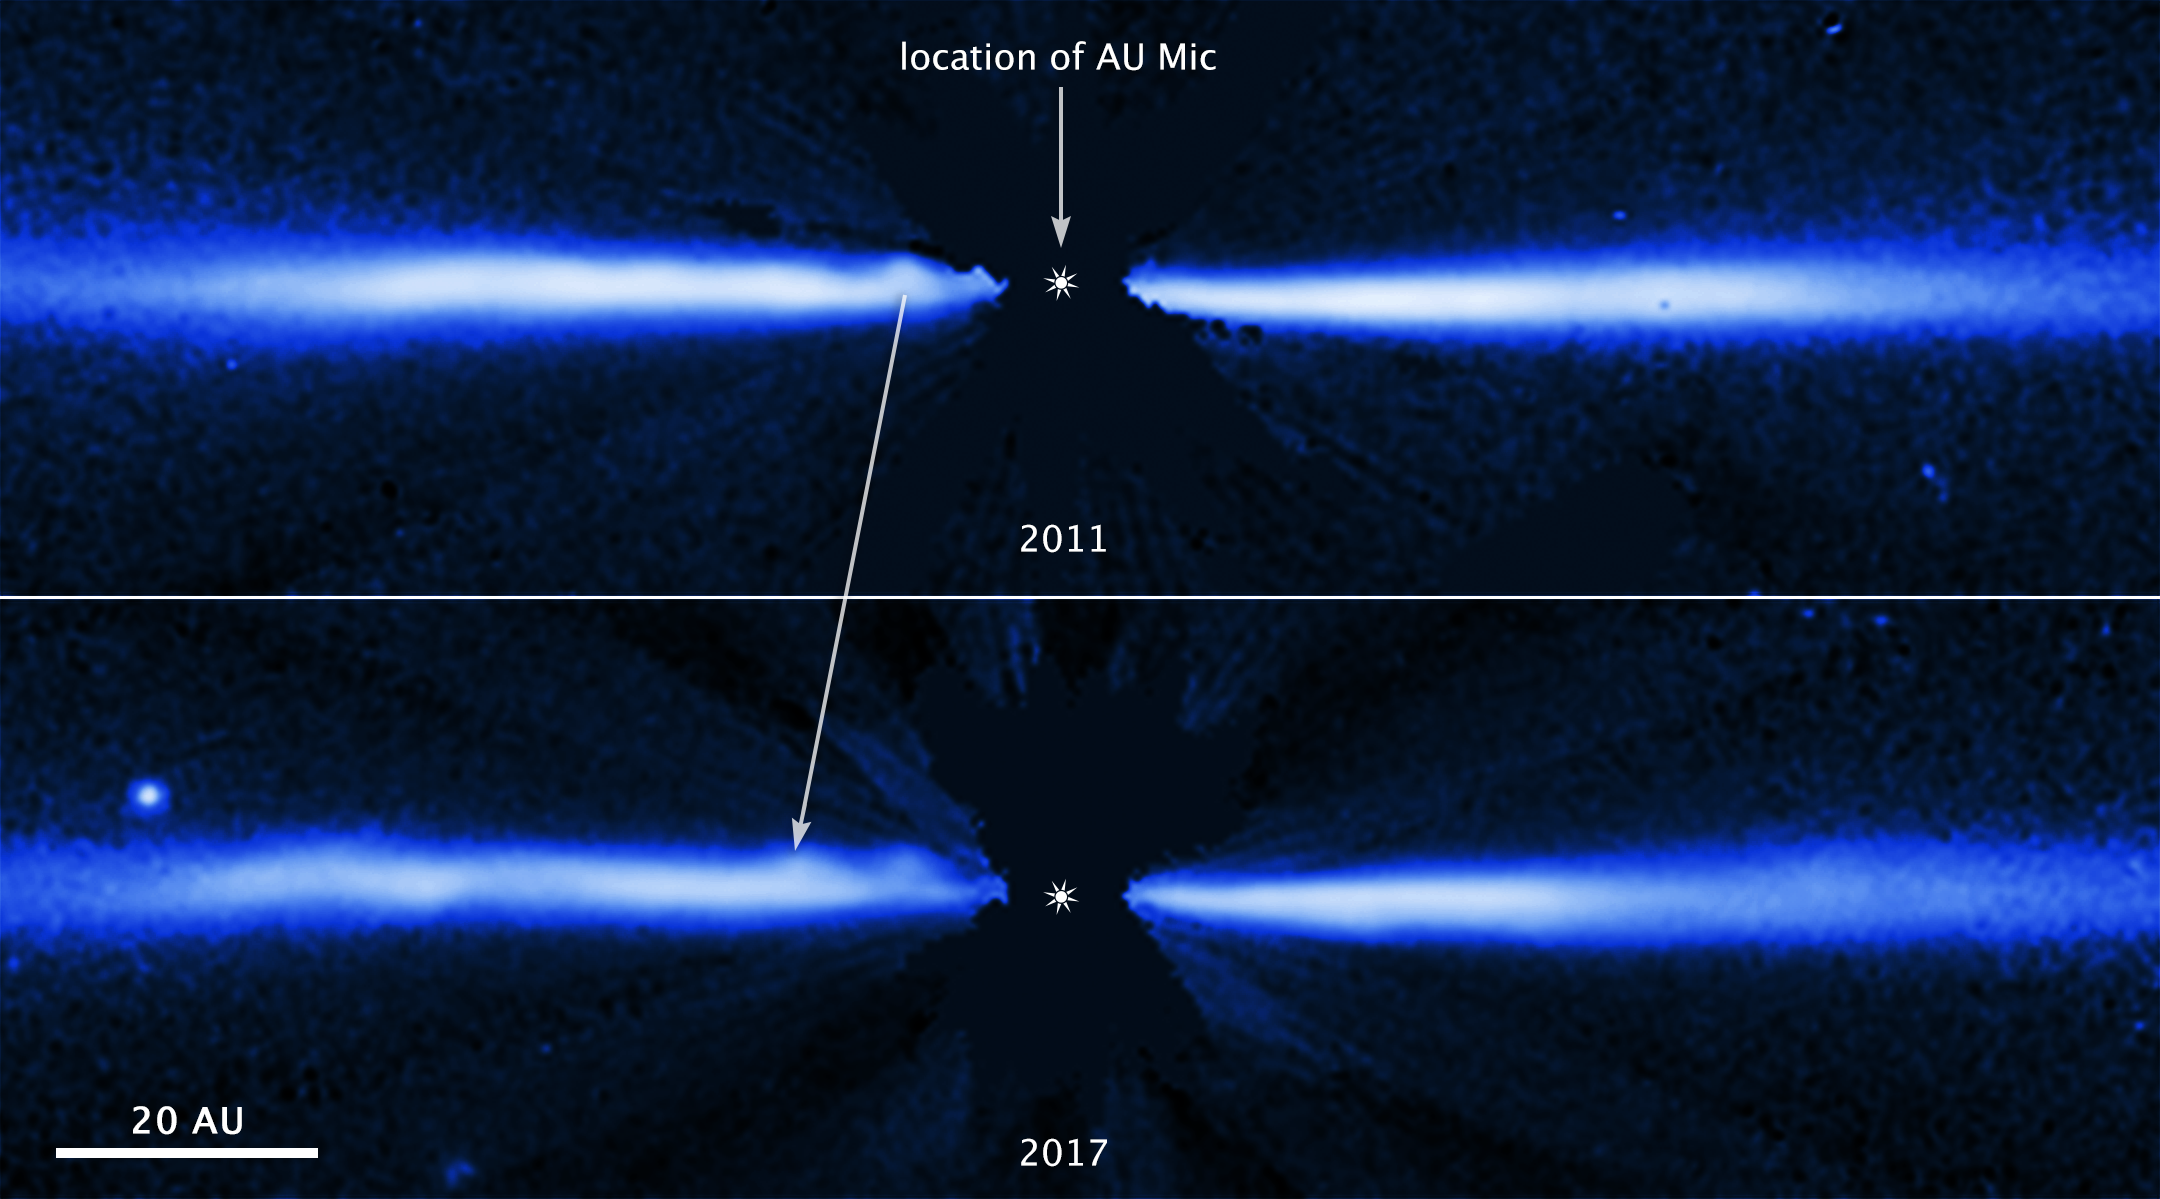

Hubble captures blobs of material sweeping through stellar disc

These two images, both taken with the NASA/ESA Hubble Space Telescope, are taken six years apart. They show fast-moving blobs of material sweeping outwardly through a debris disc around the young, nearby red dwarf star AU Microscopii (AU Mic). Red dwarfs are the most abundant and longest-lived stars in our Milky Way. AU Mic, however, is only about 23 million years old, making it a very young star.

The top image was taken in 2011; the bottom in 2017. Hubble's Space Telescope Imaging Spectrograph (STIS) took the images in visible light. This comparison of the two images shows the six-year movement of one of the known blobs (marked by an arrow). Researchers estimate that the blob, which is zipping along at nearly 24 000 kilometres an hour, traveled more than 1300 million kilometres between 2011 and 2017. That is about the distance from Earth to Saturn. Astronomers do not know how the blobs are launched through the system.

Eventually, the blob highlighted in the image will sweep through the disc, escape the star's gravitational grip, and race out into space. Astronomers expect the string of blobs to clear out the disc within 1.5 million years. Their estimated ejection speeds are between 14 000 kilometres per hour and 43 000 kilometres per hour, fast enough to escape the star's gravitational clutches. They currently range in distance from roughly 1500 million kilometres to more than 8800 million kilometres from the star.

The disc, seen edge-on, is illuminated by scattered light from the star. The glare of the star, located at the centre of the disc, has been blocked out by the STIS coronagraph so that astronomers can see more structure in the disc. The bright dot above the left side of the disc in the 2017 image is a background star.

The system resides 32 light-years away in the southern constellation Microscopium.

Credit: NASA, ESA, J. Wisniewski (University of Oklahoma), C. Grady (Eureka Scientific), and G. Schneider (Steward Observatory)